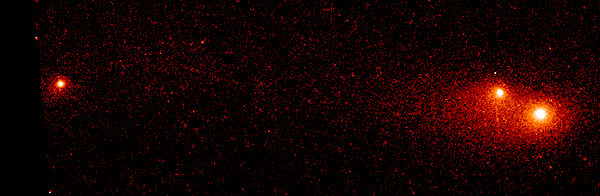

Shoemaker-Levy 9

This Hubble Space Telescope image shows the P-Q complex, also called the "gang of four' region, of Comet P/Shoemaker-Levy 9. It was taken on 4 July 1994 with the WFPC2.

Credit: Dr. H. A. Weaver, Mr. T. E. Smith, and Mr. K. B. Jones (STScI), and NASA